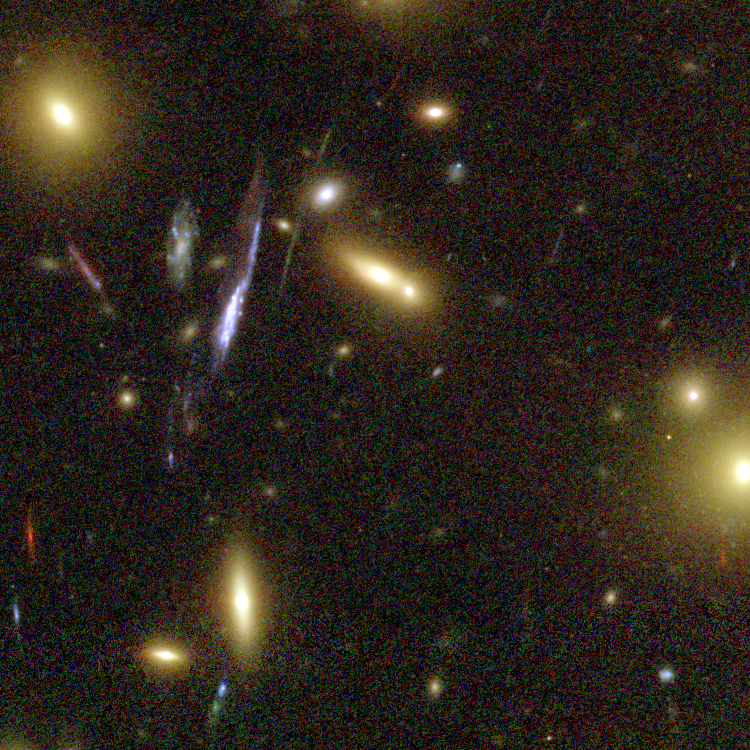

Galaxy Cluster Abell 1689 Details

The Advanced Camera for Surveys (ACS) aboard NASA's Hubble Space Telescope has here used a natural "zoom lens" in space to peer straight through the center of one of the most massive galaxy clusters known, called Abell 1689. Some of the faintest objects in this picture are probably more than 13 billion light-years away.

Credit: NASA, N. Benitez (JHU), T. Broadhurst (The Hebrew University), H. Ford (JHU), M. Clampin(STScI), G. Hartig (STScI), G. Illingworth (UCO/Lick Observatory), the ACS Science Team and ESA